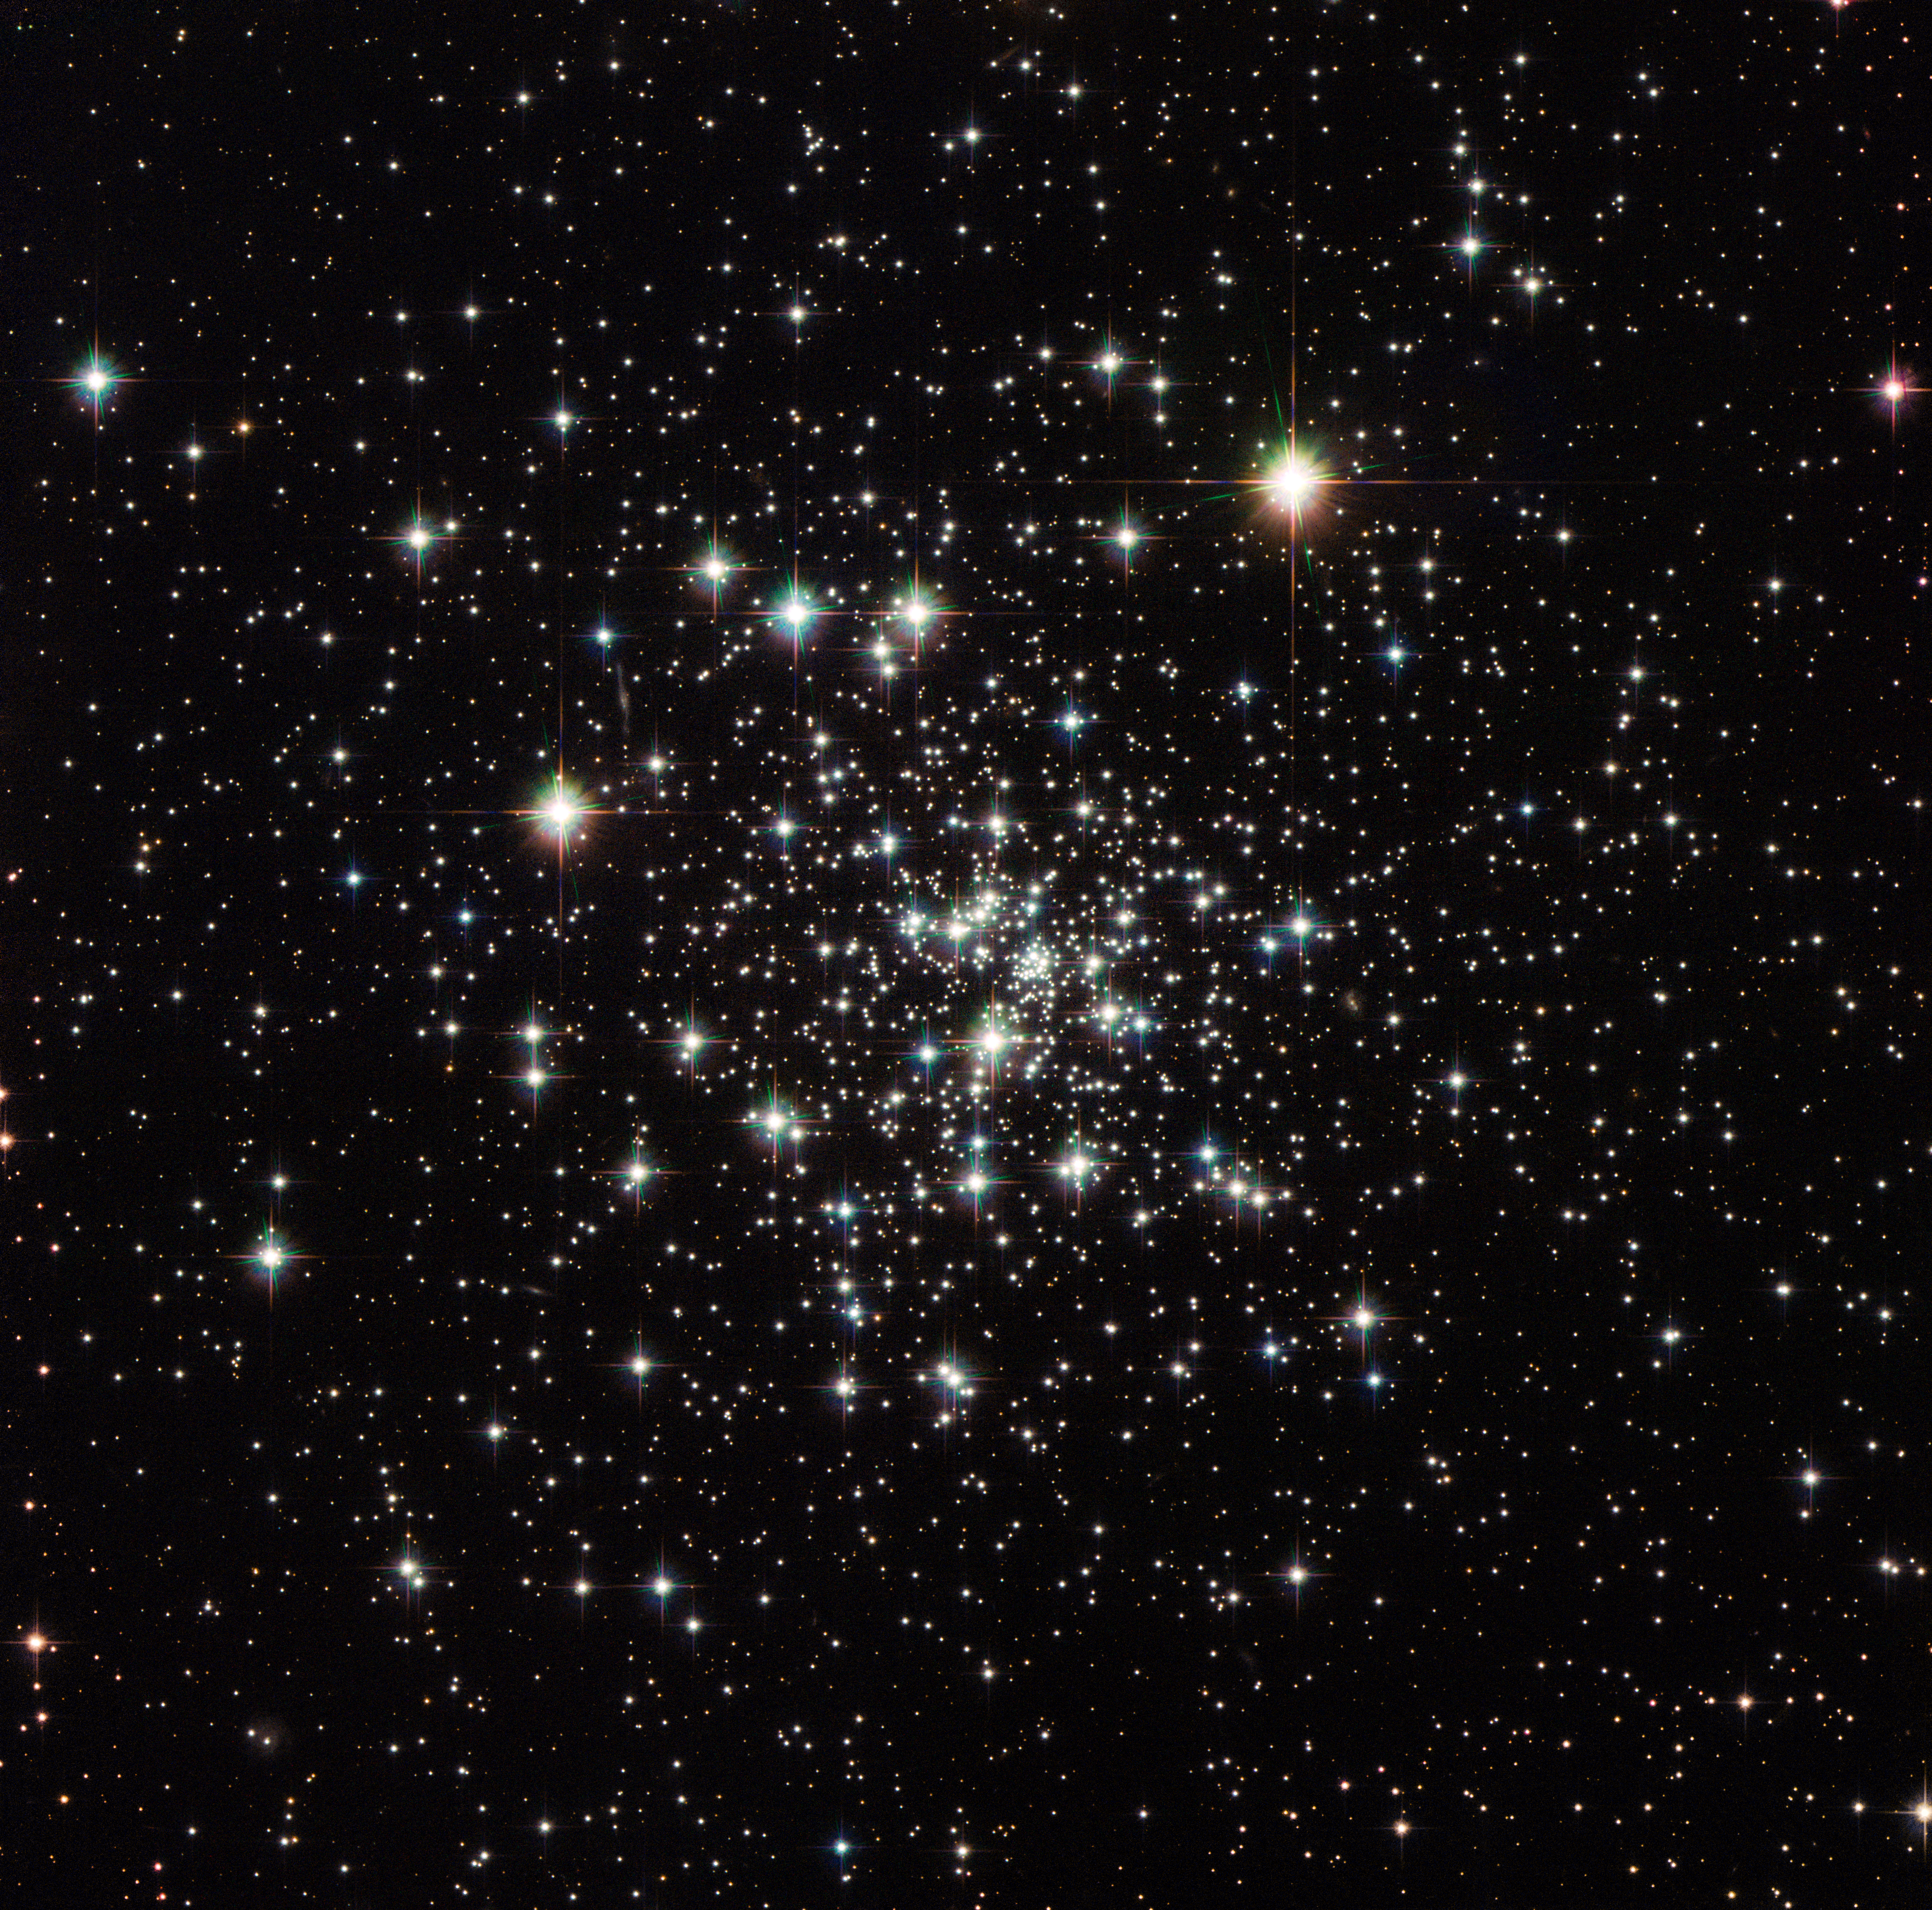

An ancient globule

This image captures the stunning NGC 6535, a globular cluster 22 000 light-years away in the constellation of Serpens (The Serpent) that measures one light-year across.

Globular clusters are tightly bound groups of stars which orbit galaxies. The large mass in the rich stellar centre of the globular cluster pulls the stars inward to form a ball of stars. The word globulus, from which these clusters take their name, is Latin for small sphere.

Globular clusters are generally very ancient objects formed around the same time as their host galaxy. To date, no new star formations have been observed within a globular cluster, which explains the abundance of aging yellow stars in this image, most of them containing very few heavy elements.

NGC 6535 was first discovered in 1852 by English astronomer John Russell Hind. The cluster would have appeared to Hind as a small, faint smudge through his telescope. Now, over 160 years later, instruments like the Advanced Camera for Surveys (ACS) and Wide Field Camera 3 (WFC3) on the NASA/ESA Hubble Space Telescope allow us to capture the cluster close up and marvel at its contents in detail.

A version of this image was entered into the Hubble's Hidden Treasures image processing competition by contestant Gilles Chapdelaine.

Credit: ESA/Hubble & NASA Acknowledgement: Gilles Chapdelaine